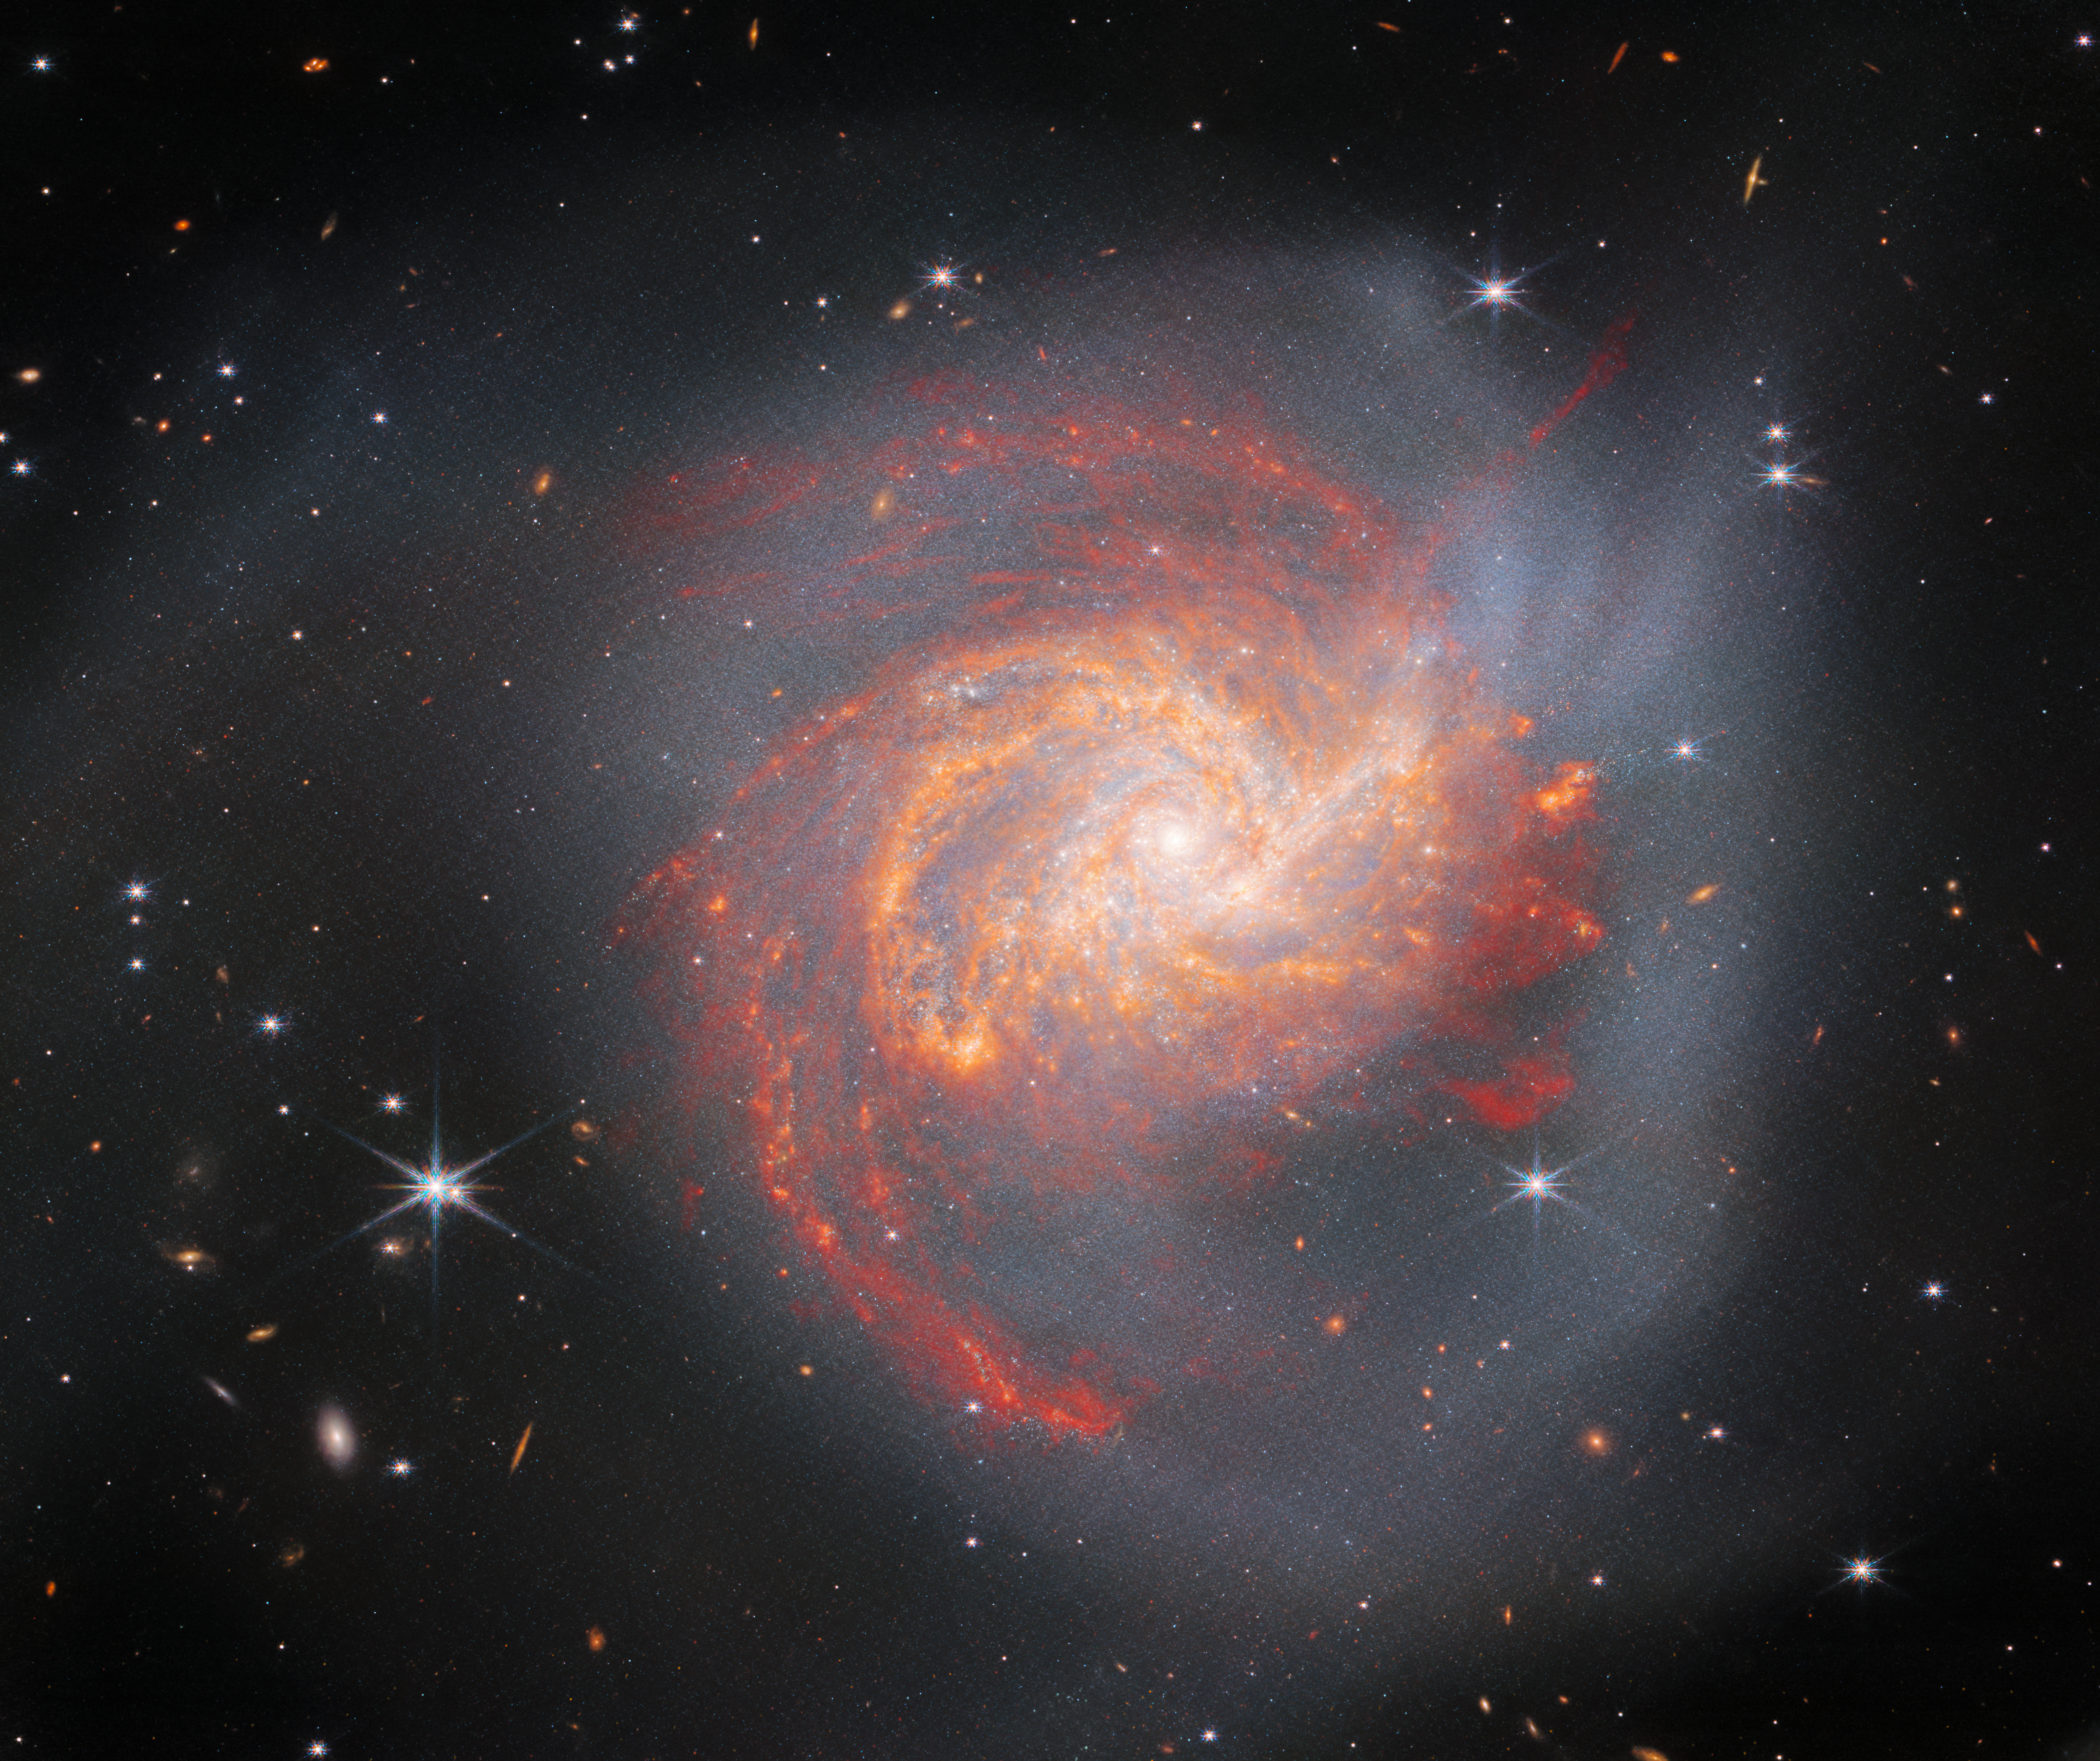

Clash of the Titans

The peculiar galaxy NGC 3256 dominates this image from the NASA/ESA/CSA James Webb Space Telescope. This Milky Way-sized galaxy lies about 120 million light-years away in the constellation Vela, and is a denizen of the Hydra-Centaurus Supercluster.

NGC 3256 may seem peaceful, a swirl of tightly entwined spiral arms set in a hazy cloud of light, but this image shows the aftermath of an ancient cosmic clash. This distorted galaxy is the wreckage of a head-on collision between two equally massive spiral galaxies which astronomers estimate to have met around 500 million years ago. The tumultuous past of NGC 3256 is captured in the long tendrils of shining dust and stars which extend outwards from the main body of the galaxy. The striking red and orange regions spread across the galaxy contain young stars created in the merger that are irradiating small dust grains, which then emit infrared light that is captured in astonishing detail by Webb’s instruments. Further out, there are extended tidal features, which are mostly stars pulled out of the galaxies when they collided.

If you were asked to picture a galaxy collision, you might picture stars careening into one another with catastrophically explosive results. In reality, the spaces between the stars in a galaxy are vast; when galaxies collide, their clouds of stars pass through one another and mingle like two clouds of smoke. The gas and dust in colliding galaxies does interact, however, and with spectacular results. The galactic collision that created NGC 3256 triggered a luminous burst of star formation that can be seen in the brightest portions of this image. These infant stars shine most brightly at infrared wavelengths, light which can penetrate through obscuring dust in the galaxy, and which makes the stars perfect subjects for Webb.

This observation is one of several which take a detailed look at the physics of star formation and black hole growth in nearby merging galaxies, hoping to transform astronomers' understanding of galactic evolution. Capturing a selection of luminous infrared galaxies like NGC 3256 will help the astronomical community to understand how Webb can unravel the complex histories of nearby star-forming galaxies.

This image contains data from Webb’s Near-InfraRed Camera and Mid-InfraRed Instrument, which — as the names suggest — capture NGC 3256 in stunning detail at infrared wavelengths. Previous observations of NGC 3256 with the NASA/ESA Hubble Space Telescope revealed this cosmic collision at visible wavelengths, and Hubble and Webb observations are shown side-by-side using the slider tool here.

Credit: ESA/Webb, NASA & CSA, L. Armus, A. Evans